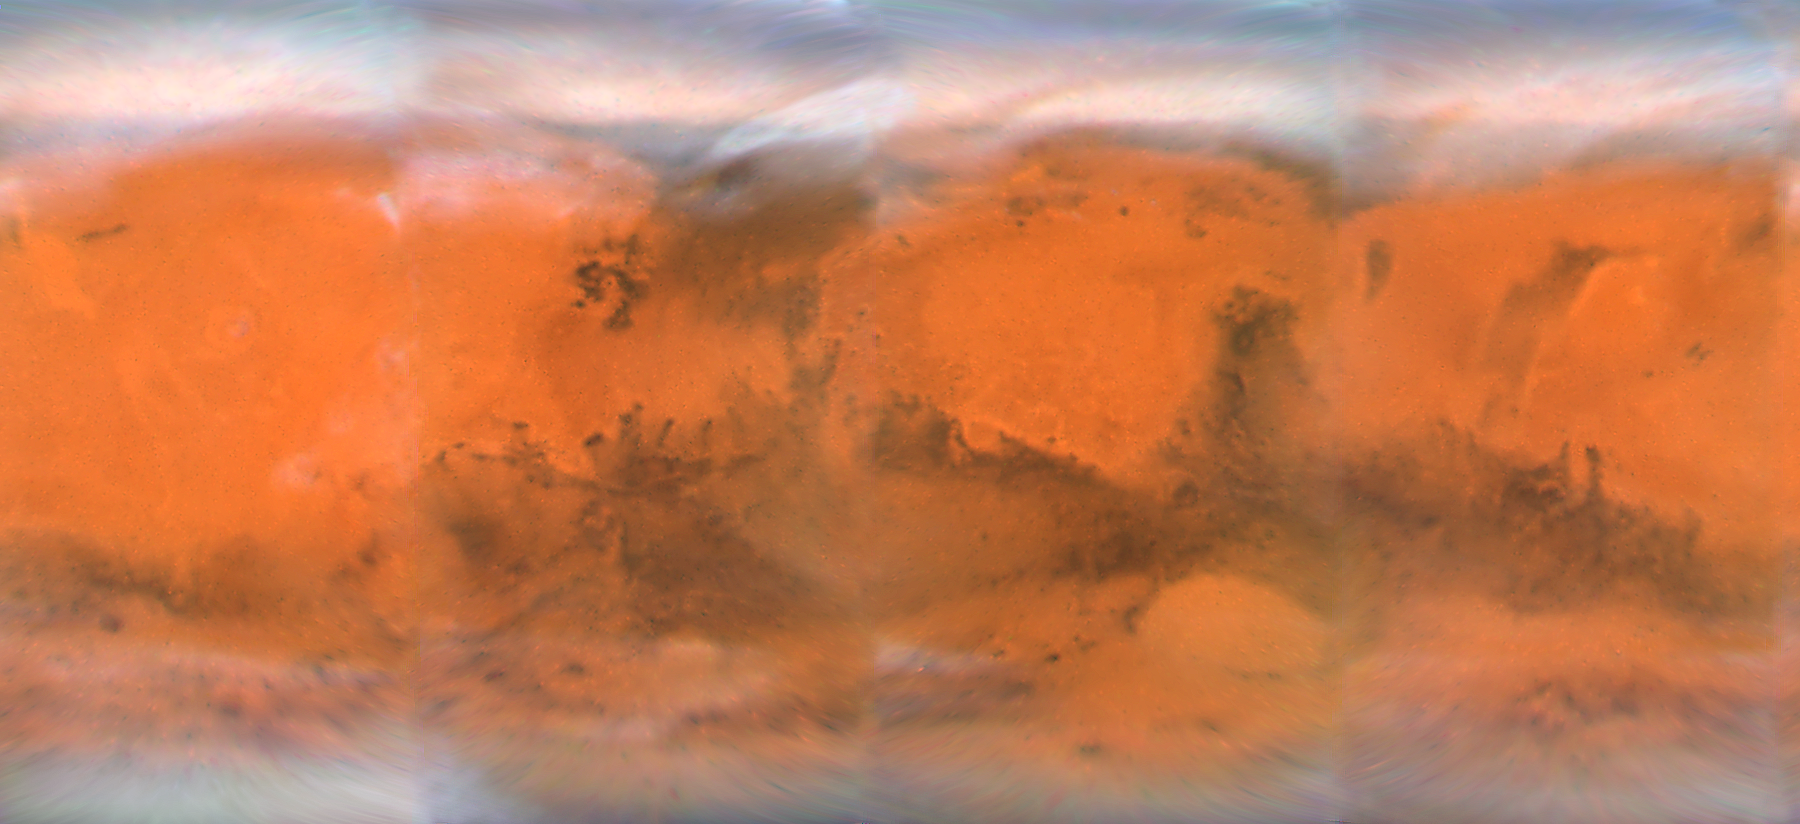

Mars Projection Map

This map spans 360 degrees of Mars' surface, starting at a longitude line of 230 degrees on the left edge. It spans nearly to the north and south polar cap regions in Mars' latitude. This map is a composite of images taken with the Hubble Space Telescope's Wide Field Planetary Camera 2 in early December, just weeks before its December 18, 2007 closest approach.

Credit: NASA, ESA, the Hubble Heritage Team (STScI/AURA), J. Bell (Cornell University), and M. Wolff (Space Science Institute, Boulder)